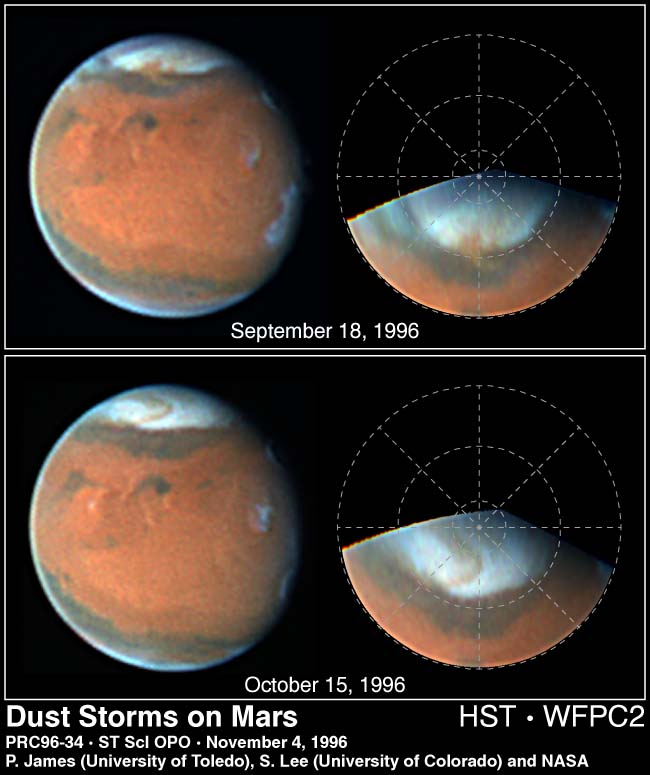

Dust Storms on Mars

Two Hubble Space Telescope images of Mars, taken about a month apart on September 18 and October 15, 1996, reveal a state-sized dust storm churning near the edge of the Martian north polar cap.

Mars is famous for large, planet-wide dust storms. Smaller storms resembling the one seen here were observed in other regions by Viking orbiters in the late 1970s.

Credit: Phil James (University of Toledo), Steve Lee (University of Colorado) and NASA/ESA